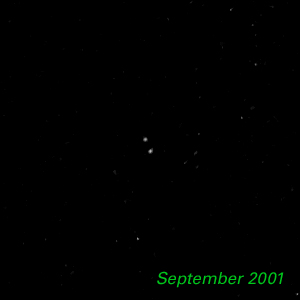

September 2001 - Kuiper Belt Object 1998 WW31

The Hubble Space Telescope is hot on the trail of a puzzling new class of solar system object that might be called a Pluto "mini-me." Together, these objects are 5,000 times less massive than Pluto and Charon. Like Pluto and Charon, these dim and fleeting objects travel in pairs in the frigid, mysterious outer realm of the solar system called the Kuiper Belt, a long-hypothesized "junkyard" of countless icy bodies left over from the solar system's formation. A total of seven binary Kuiper Belt objects have been seen so far by Hubble and ground-based observatories. Among them is a pair called 1998 WW31, which the Hubble telescope studied in detail.

Credit: NASA & ESA